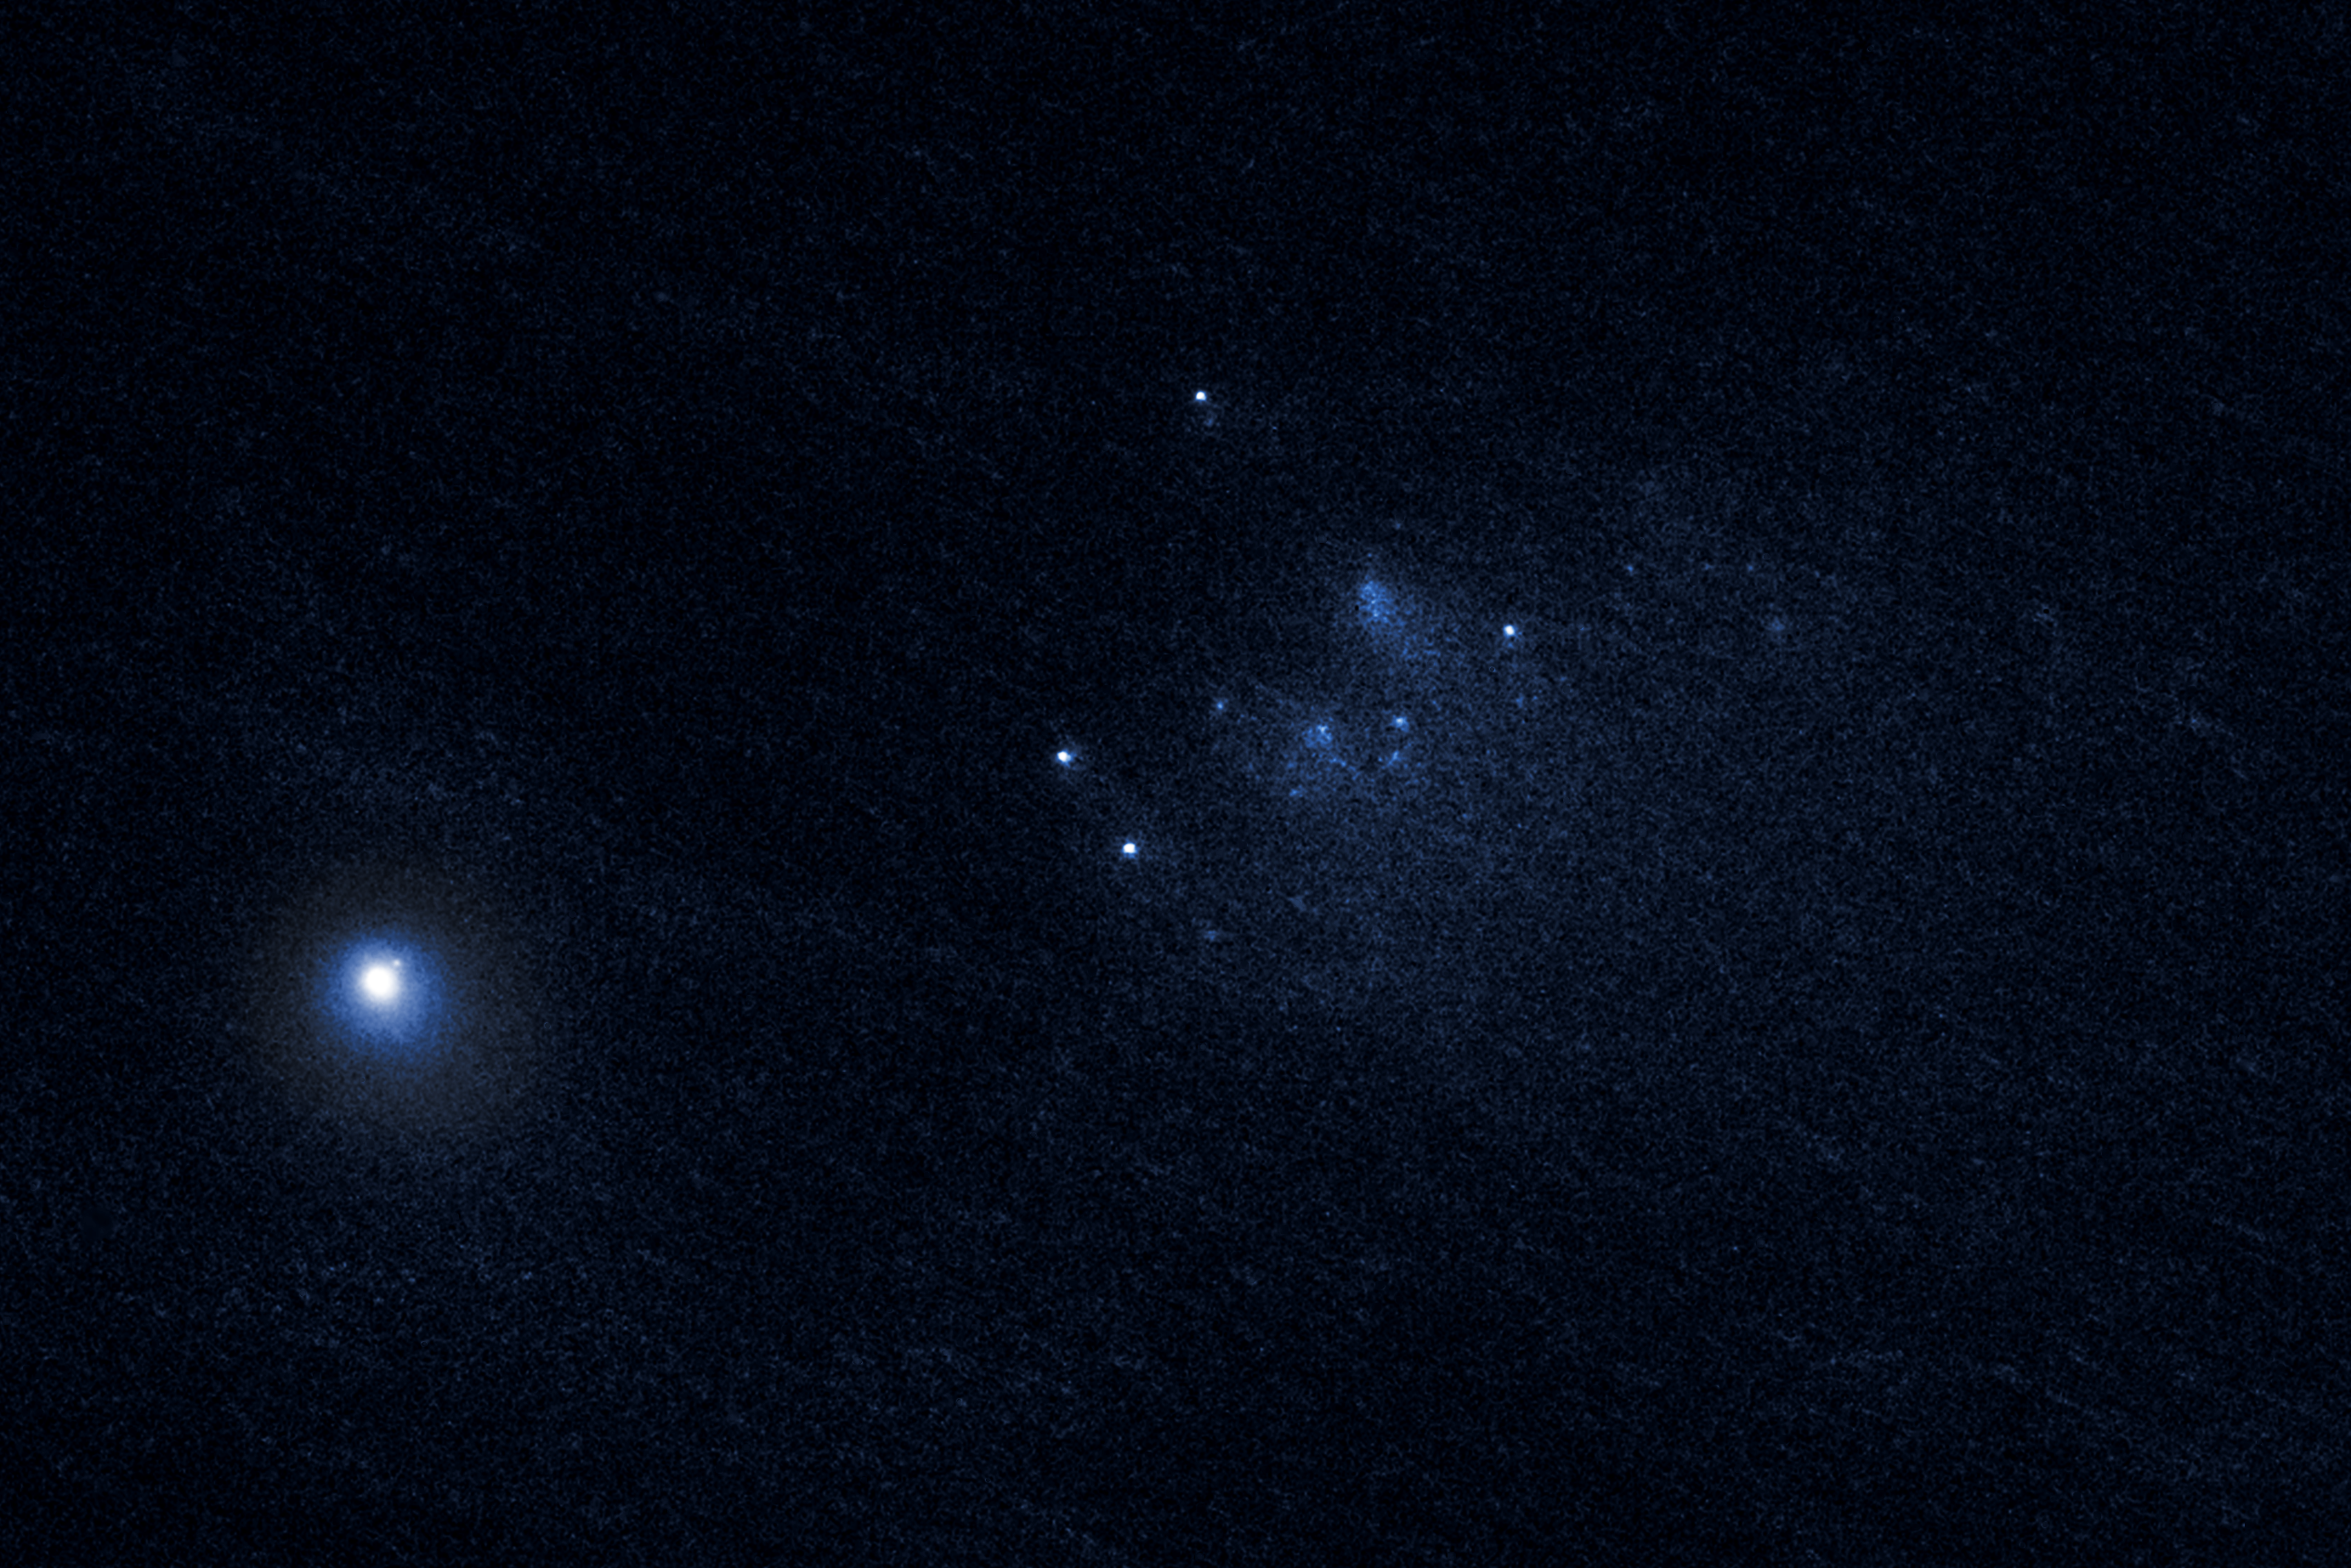

Cosmic fragments

This intriguing new image captured with the NASA/ESA Hubble Space Telescope shows a dust-bathed cluster of fragments from a disintegrated comet. The comet in question, named 332P/Ikeya-Murakami, split into this shower of fragments in the closing months of 2015.

Fragmenting comets such as 332P/Ikeya-Murakami have long been objects of fascination for astronomers worldwide. Famously, Comet Shoemaker-Levy 9 disintegrated in 1992, crashing into the atmosphere of Jupiter at nearly 200 000 kilometres per hour, creating scars on it almost half the size of Earth.

Though well-studied, objects such as this remain a puzzle to astronomers; no theory fully explains why comets split apart on their long journeys around the Sun. Hubble will continue to observe 332P/Ikeya-Murakami and comets like it, unravelling the nature of these mysterious objects.

Credit: NASA, ESA, and D. Jewitt (UCLA)